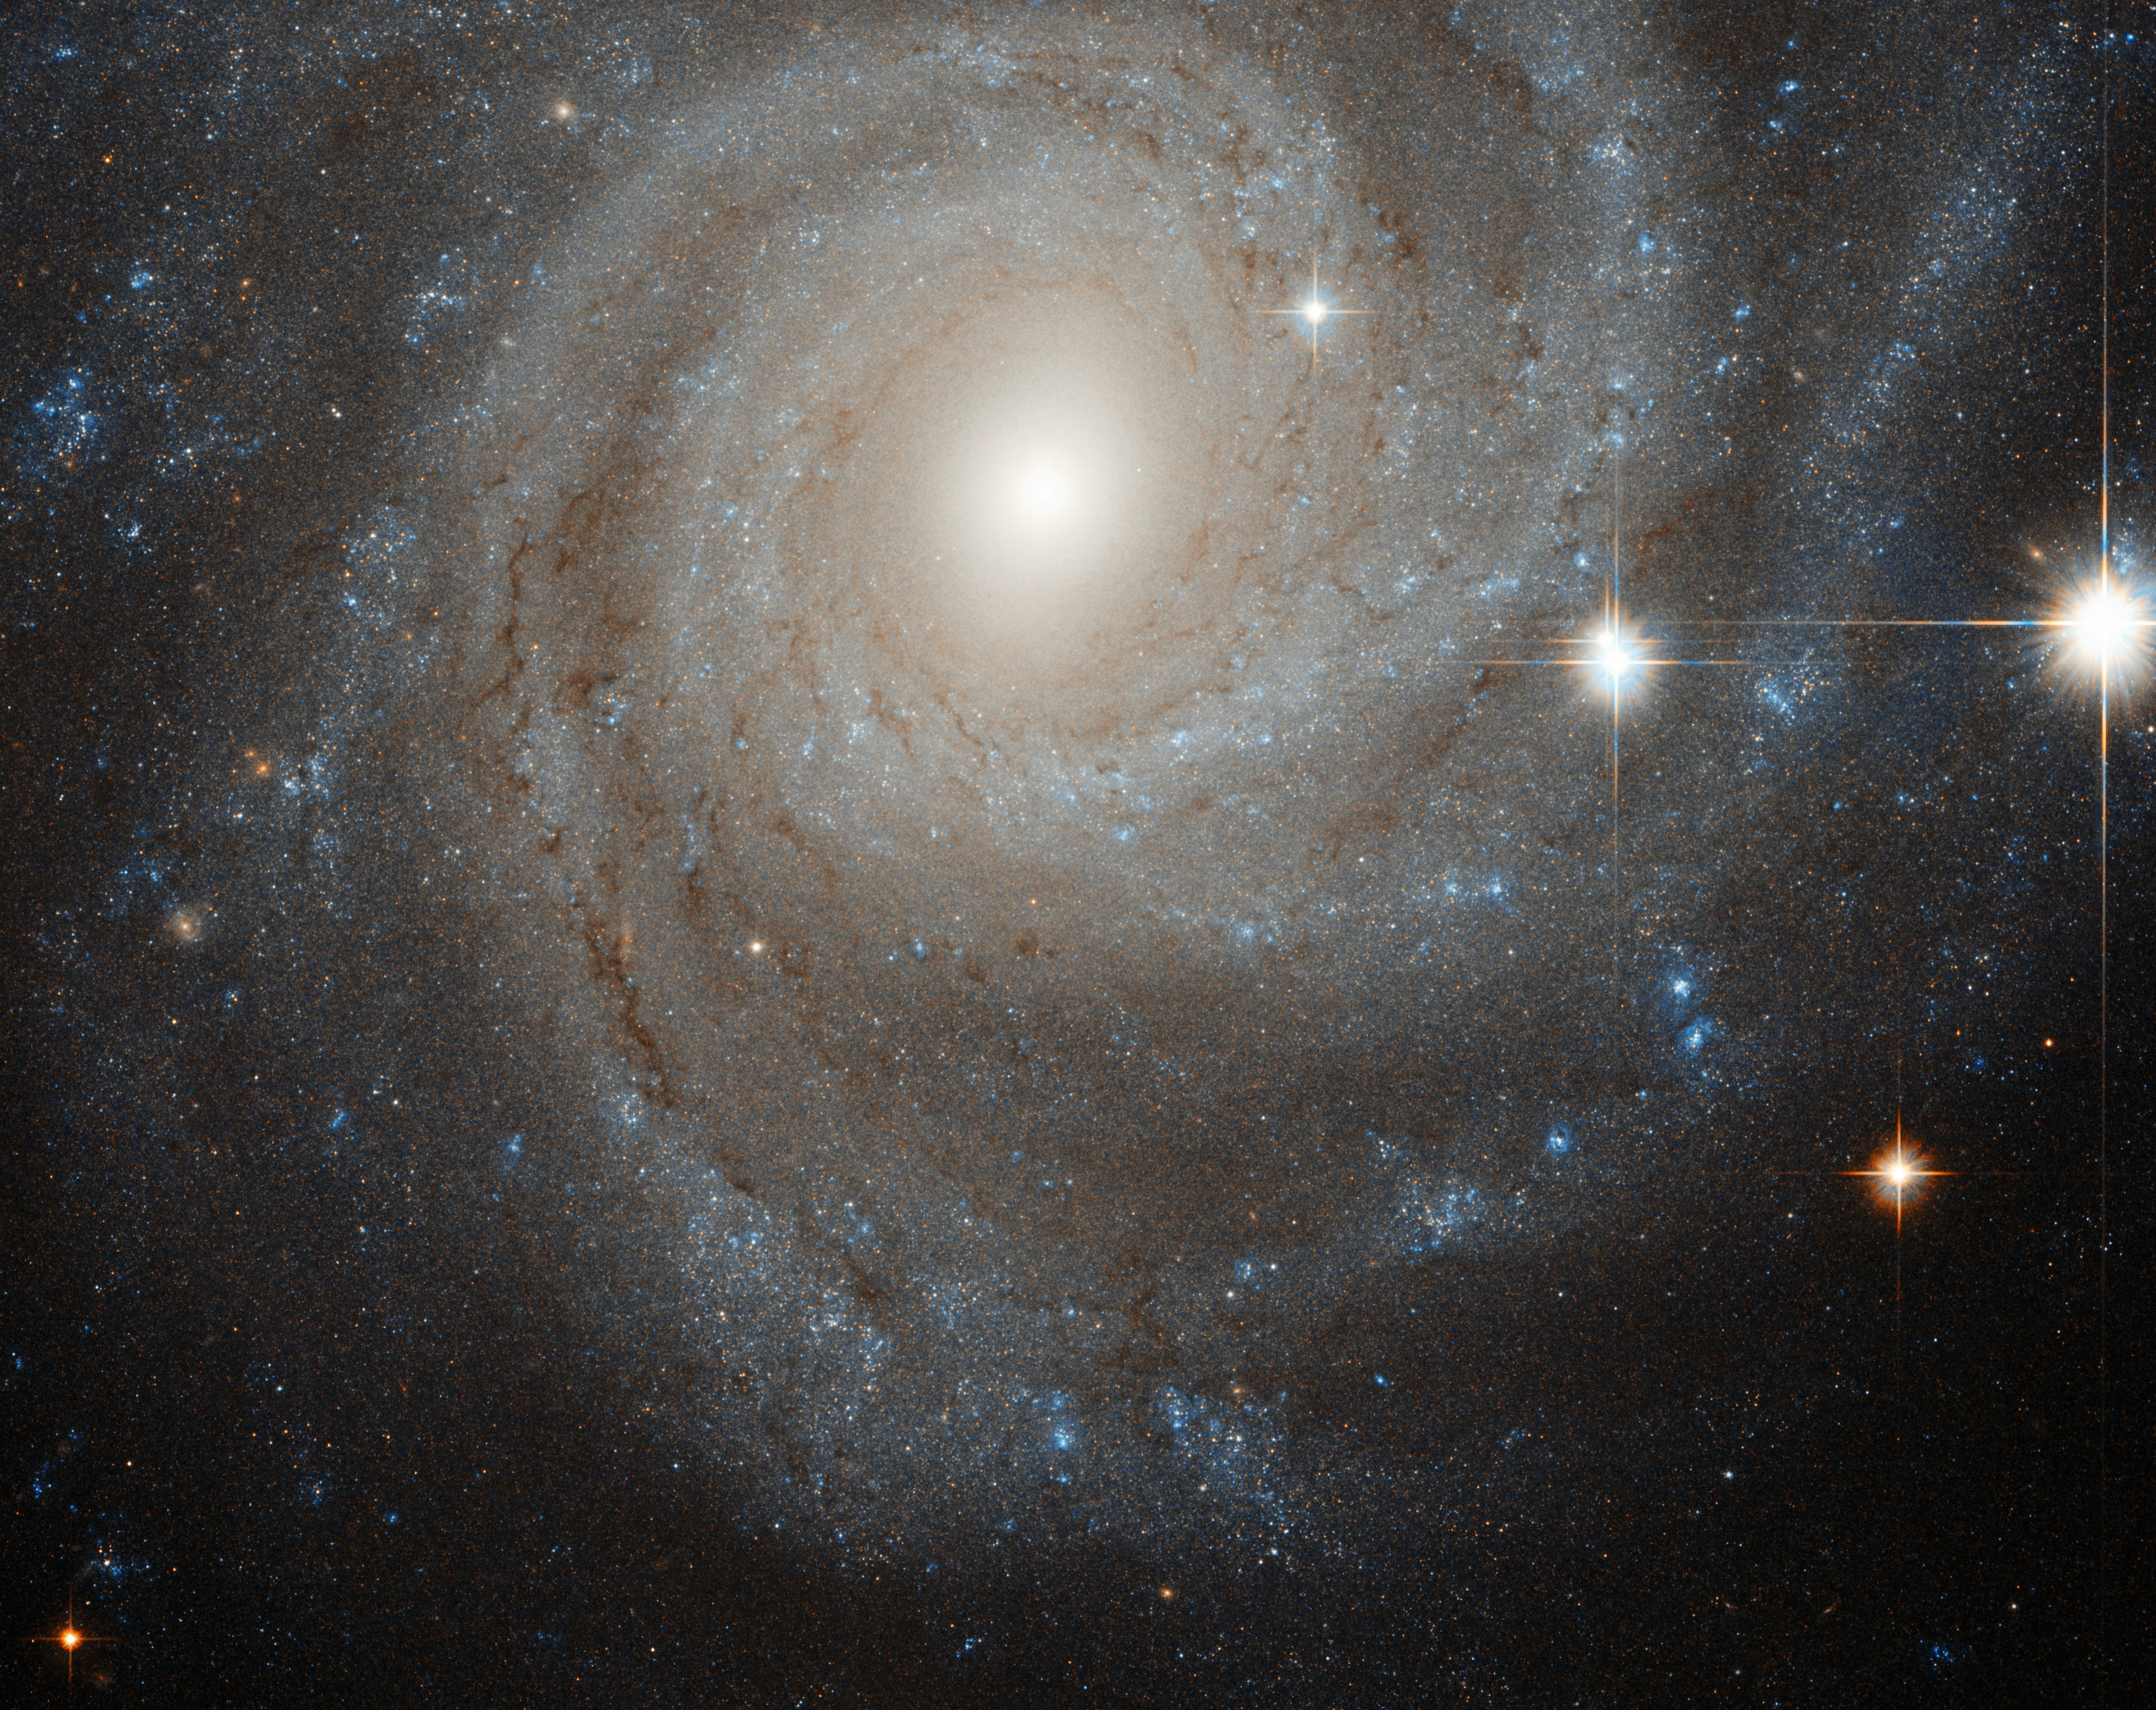

Galaxy in a spin

NGC 3344 is a glorious spiral galaxy around half the size of the Milky Way, which lies 25 million light-years distant. We are fortunate enough to see NGC 3344 face-on, allowing us to study its structure in detail.

The galaxy features an outer ring swirling around an inner ring with a subtle bar structure in the centre. The central regions of the galaxy are predominately populated by young stars, with the galactic fringes also featuring areas of active star formation.

Central bars are found in around two thirds of spiral galaxies. NGC 3344’s is clearly visible here, although it is not as dramatic as some (see for example heic1202).

The high density of stars in galaxies’ central regions gives them enough gravitational influence to affect the movement of other stars in their galaxy. However, NGC 3344’s outer stars are moving in an unusual manner, although the presence of the bar cannot entirely account for this, leaving astronomers puzzled. It is possible that in its past NGC 3344 passed close by another galaxy and accreted stars from it, but more research is needed to state this with confidence.

The image is a combination of exposures taken in visible and near-infrared light, using Hubble’s Advanced Camera for Surveys. The field of view is around 3.4 by 3.4 arcminutes, or around a tenth of the diameter of the full Moon.

Credit: ESA/Hubble & NASA